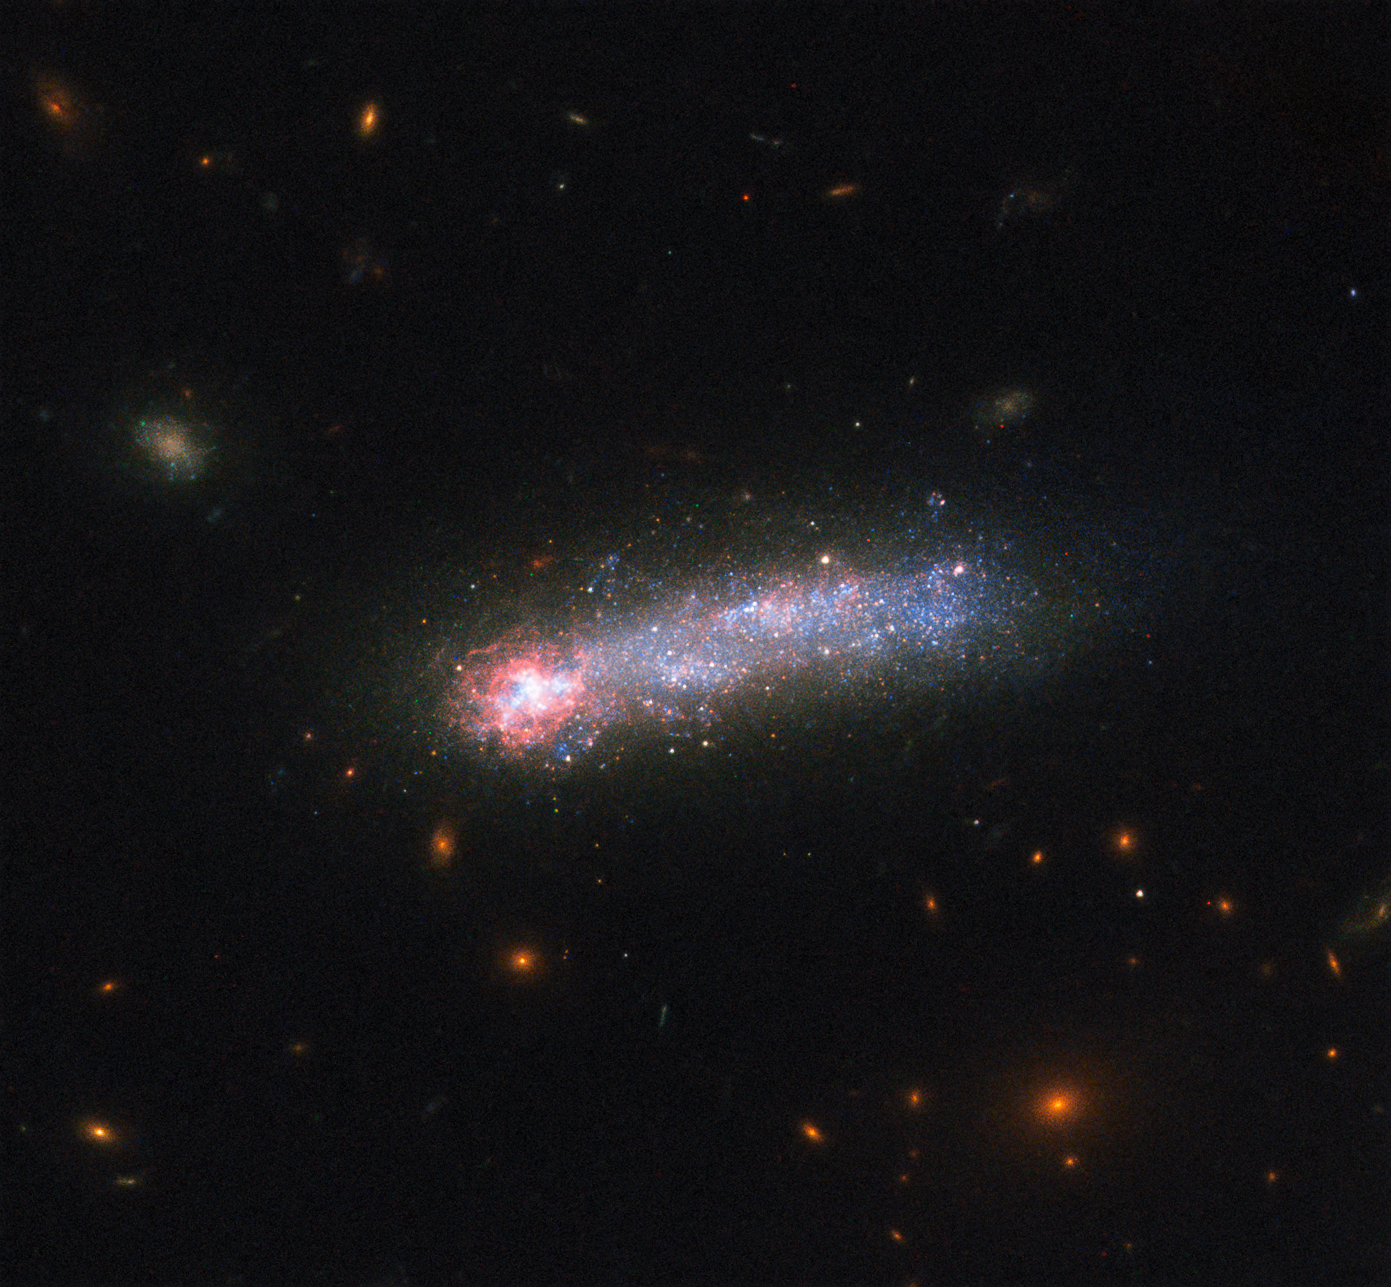

LEDA 36252, a cosmic tadpole

In this new image from the NASA/ESA Hubble Space Telescope, a firestorm of star birth is lighting up one end of the diminutive galaxy LEDA 36252 — also known as Kiso 5649.

The galaxy is a member of a class of galaxies called “tadpoles” because of their bright heads and elongated tails. This galaxy resides relatively nearby, at a distance of 80 million light-years. Tadpoles are rare in the local Universe but common in the distant Universe, suggesting that many galaxies pass through a phase like this as they evolve.

Credit: NASA, ESA, and D. Elmegreen (Vassar College), B. Elmegreen (IBM’s Thomas J. Watson Research Center), J. Almeida, C. Munoz-Tunon, and M. Filho (Instituto de Astrofisica de Canarias), J. Mendez-Abreu (University of St. Andrews), J. Gallagher (University of Wisconsin-Madison), M. Rafelski (NASA Goddard Space Flight Center), and D. Ceverino (Center for Astronomy at Heidelberg University)